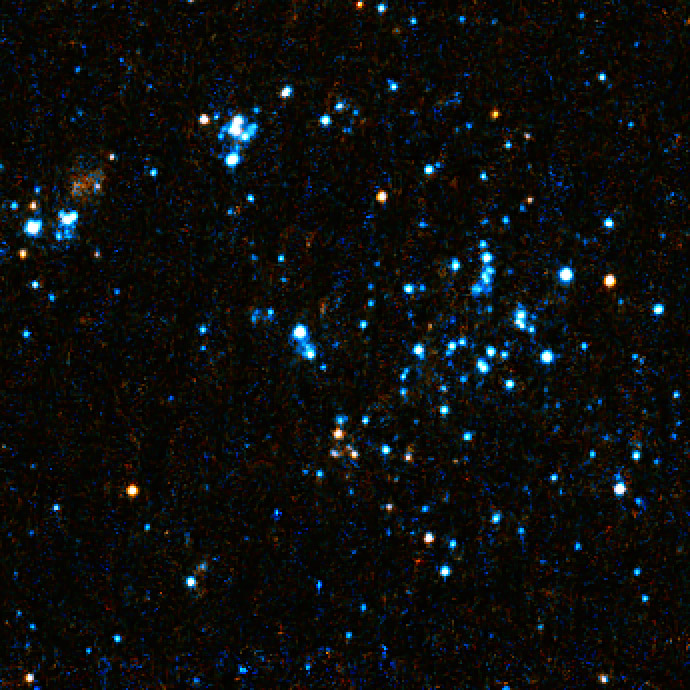

Close-up on "blue blobs"

A Hubble Space Telescope visible light close-up of bright blue star clusters in Arp's Loop in the M81-M82 galaxy group.

Credit: NASA, ESA, and D. de Mello (Catholic University of America/GSFC)